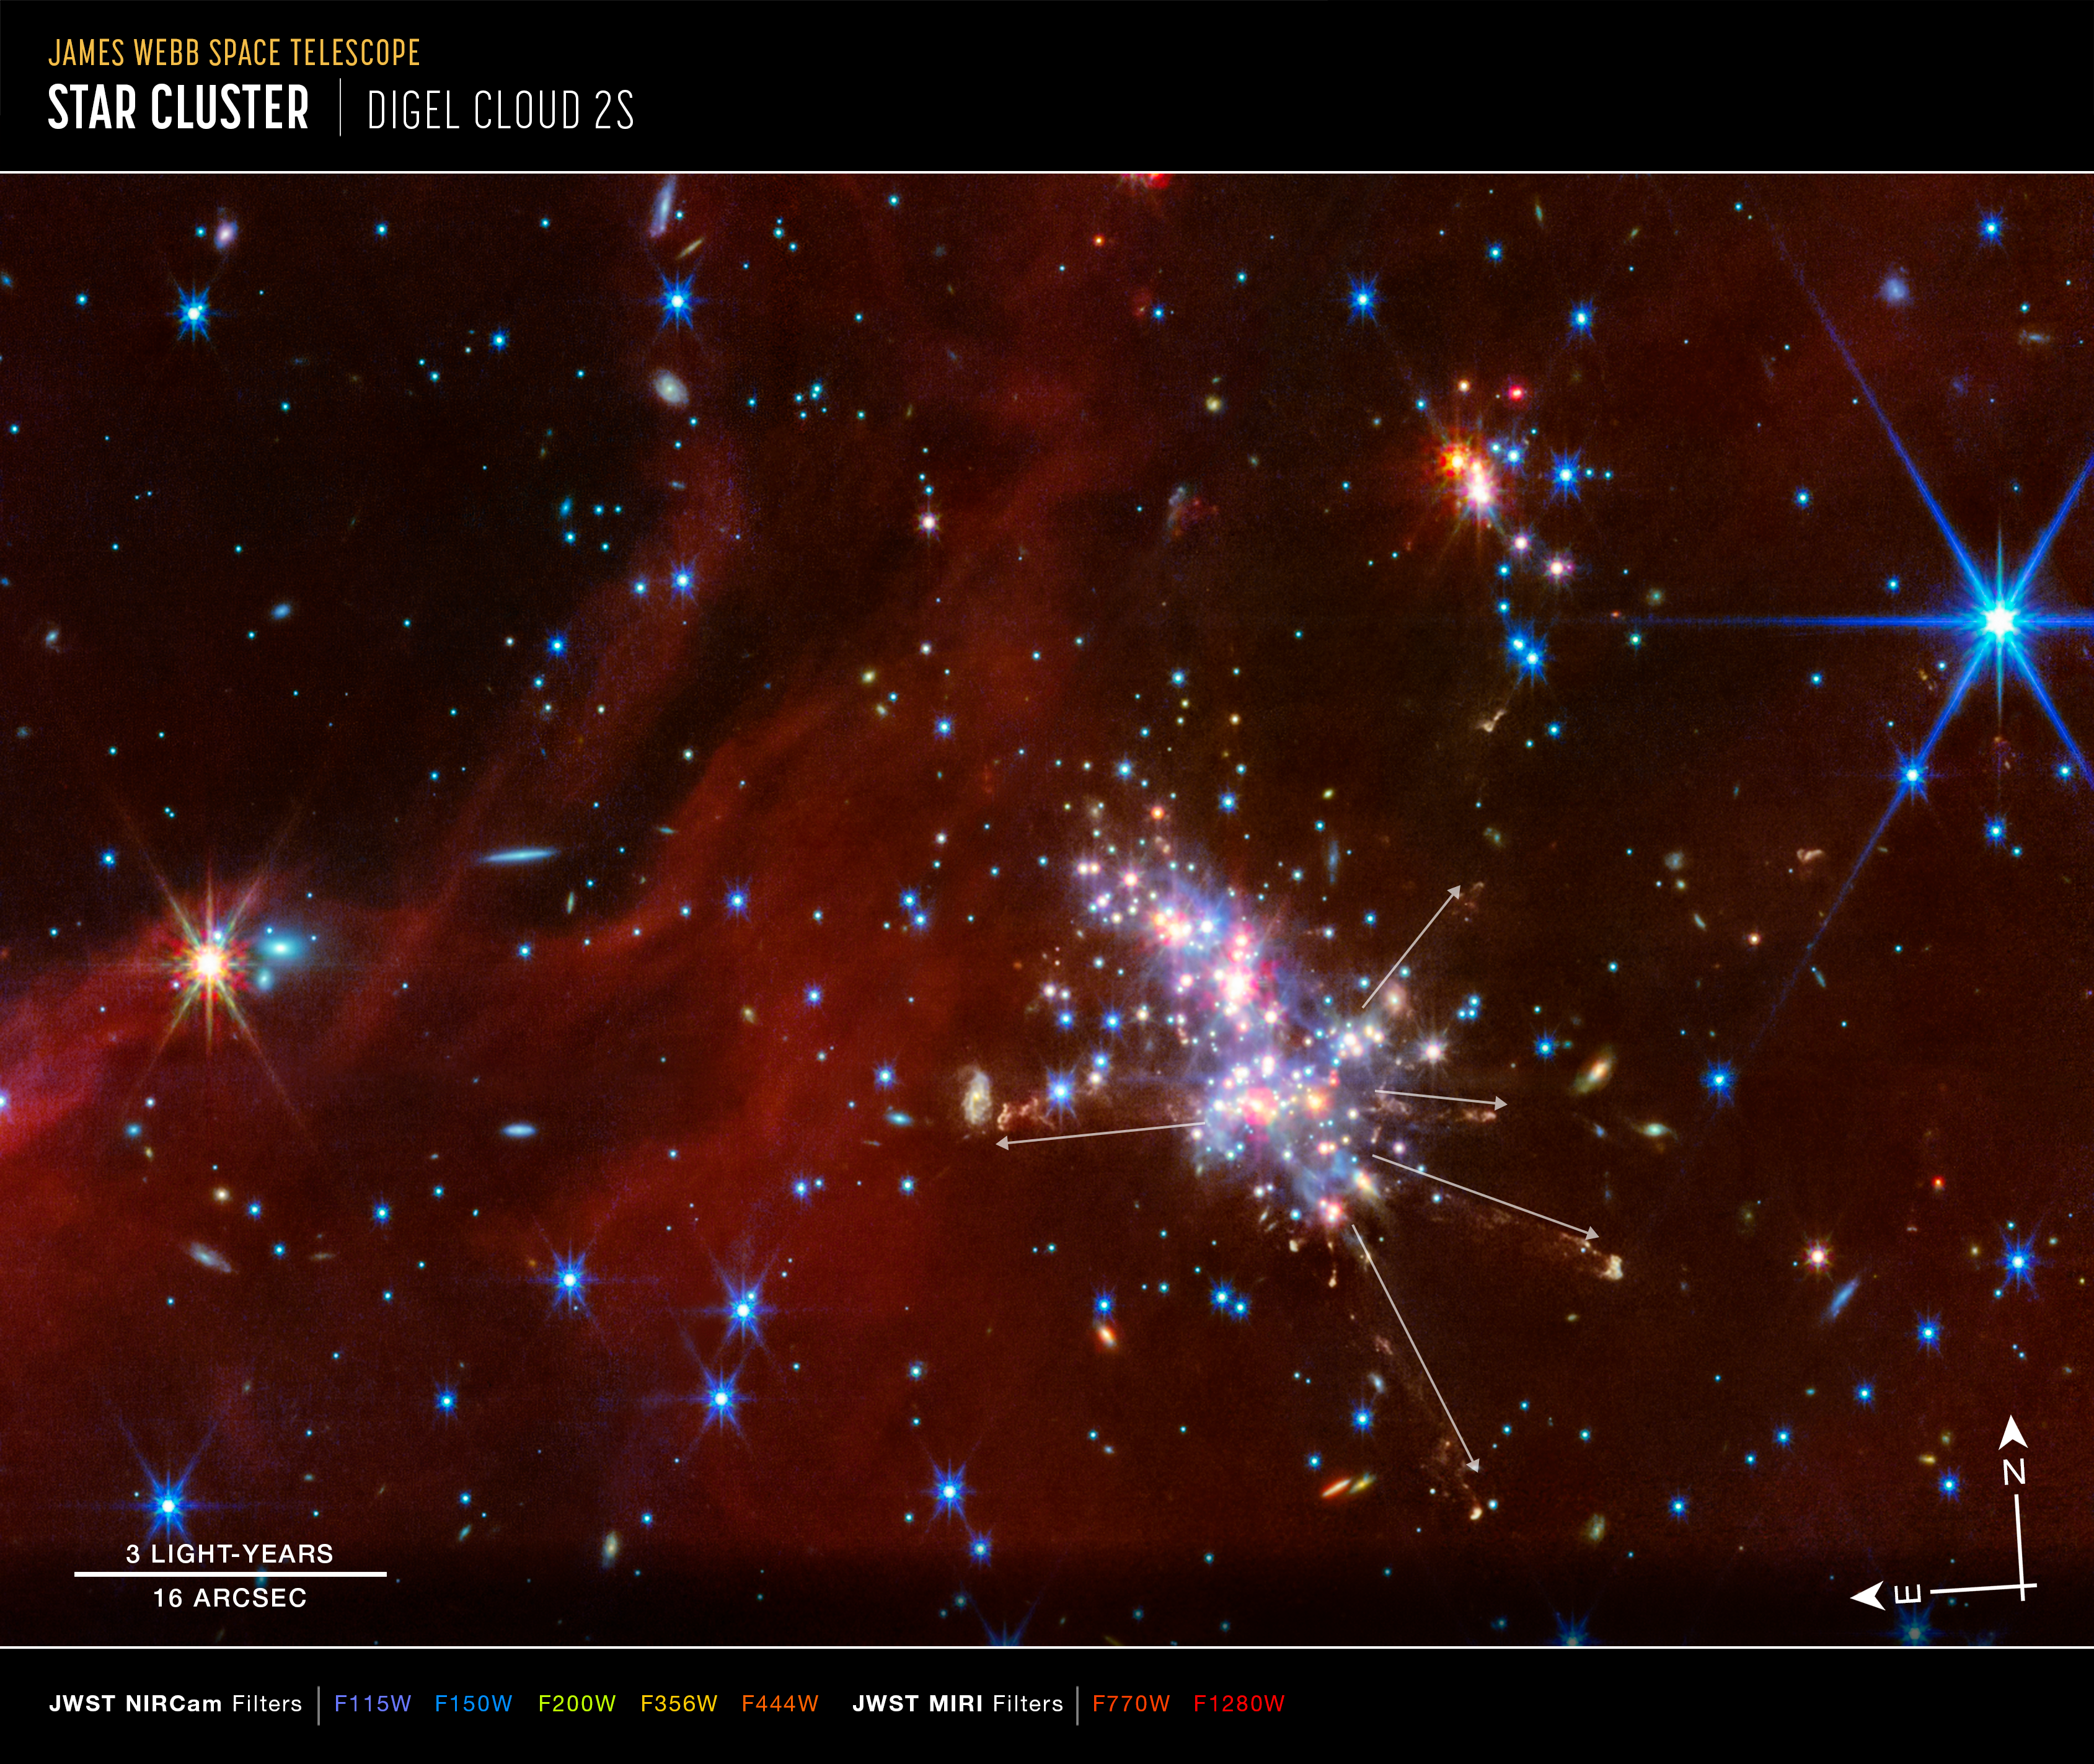

Digel Cloud 2S (annotated)

Annotated image of Digel Cloud 2S captured by Webb's NIRCam (Near-Infrared Camera) and MIRI (Mid-Infrared Instrument), with compass arrows, a scale bar, colour key, and graphic overlays for reference.

The north and east compass arrows show the orientation of the image on the sky. Note that the relationship between north and east on the sky (as seen from below) is flipped relative to direction arrows on a map of the ground (as seen from above).

The scale bar is labelled in light-years and arcseconds. One light-year is equal to about 9.46 trillion kilometres. One arcsecond is equal to 1/3600 of one degree of arc (the full Moon has an angular diameter of about 0.5 degrees). The actual size of an object that covers one arcsecond on the sky depends on its distance from the telescope.

This image shows invisible near- and mid-infrared wavelengths of light that have been translated into visible-light colours. The colour key shows which NIRCam and MIRI filters were used when collecting the light. The colour of each filter name is the visible light colour used to represent the infrared light that passes through that filter.

In the main cluster are five white arrows, which highlight the paths of five protostar jets.

Credit: NASA, ESA, CSA, STScI, M. Ressler (NASA-JPL)